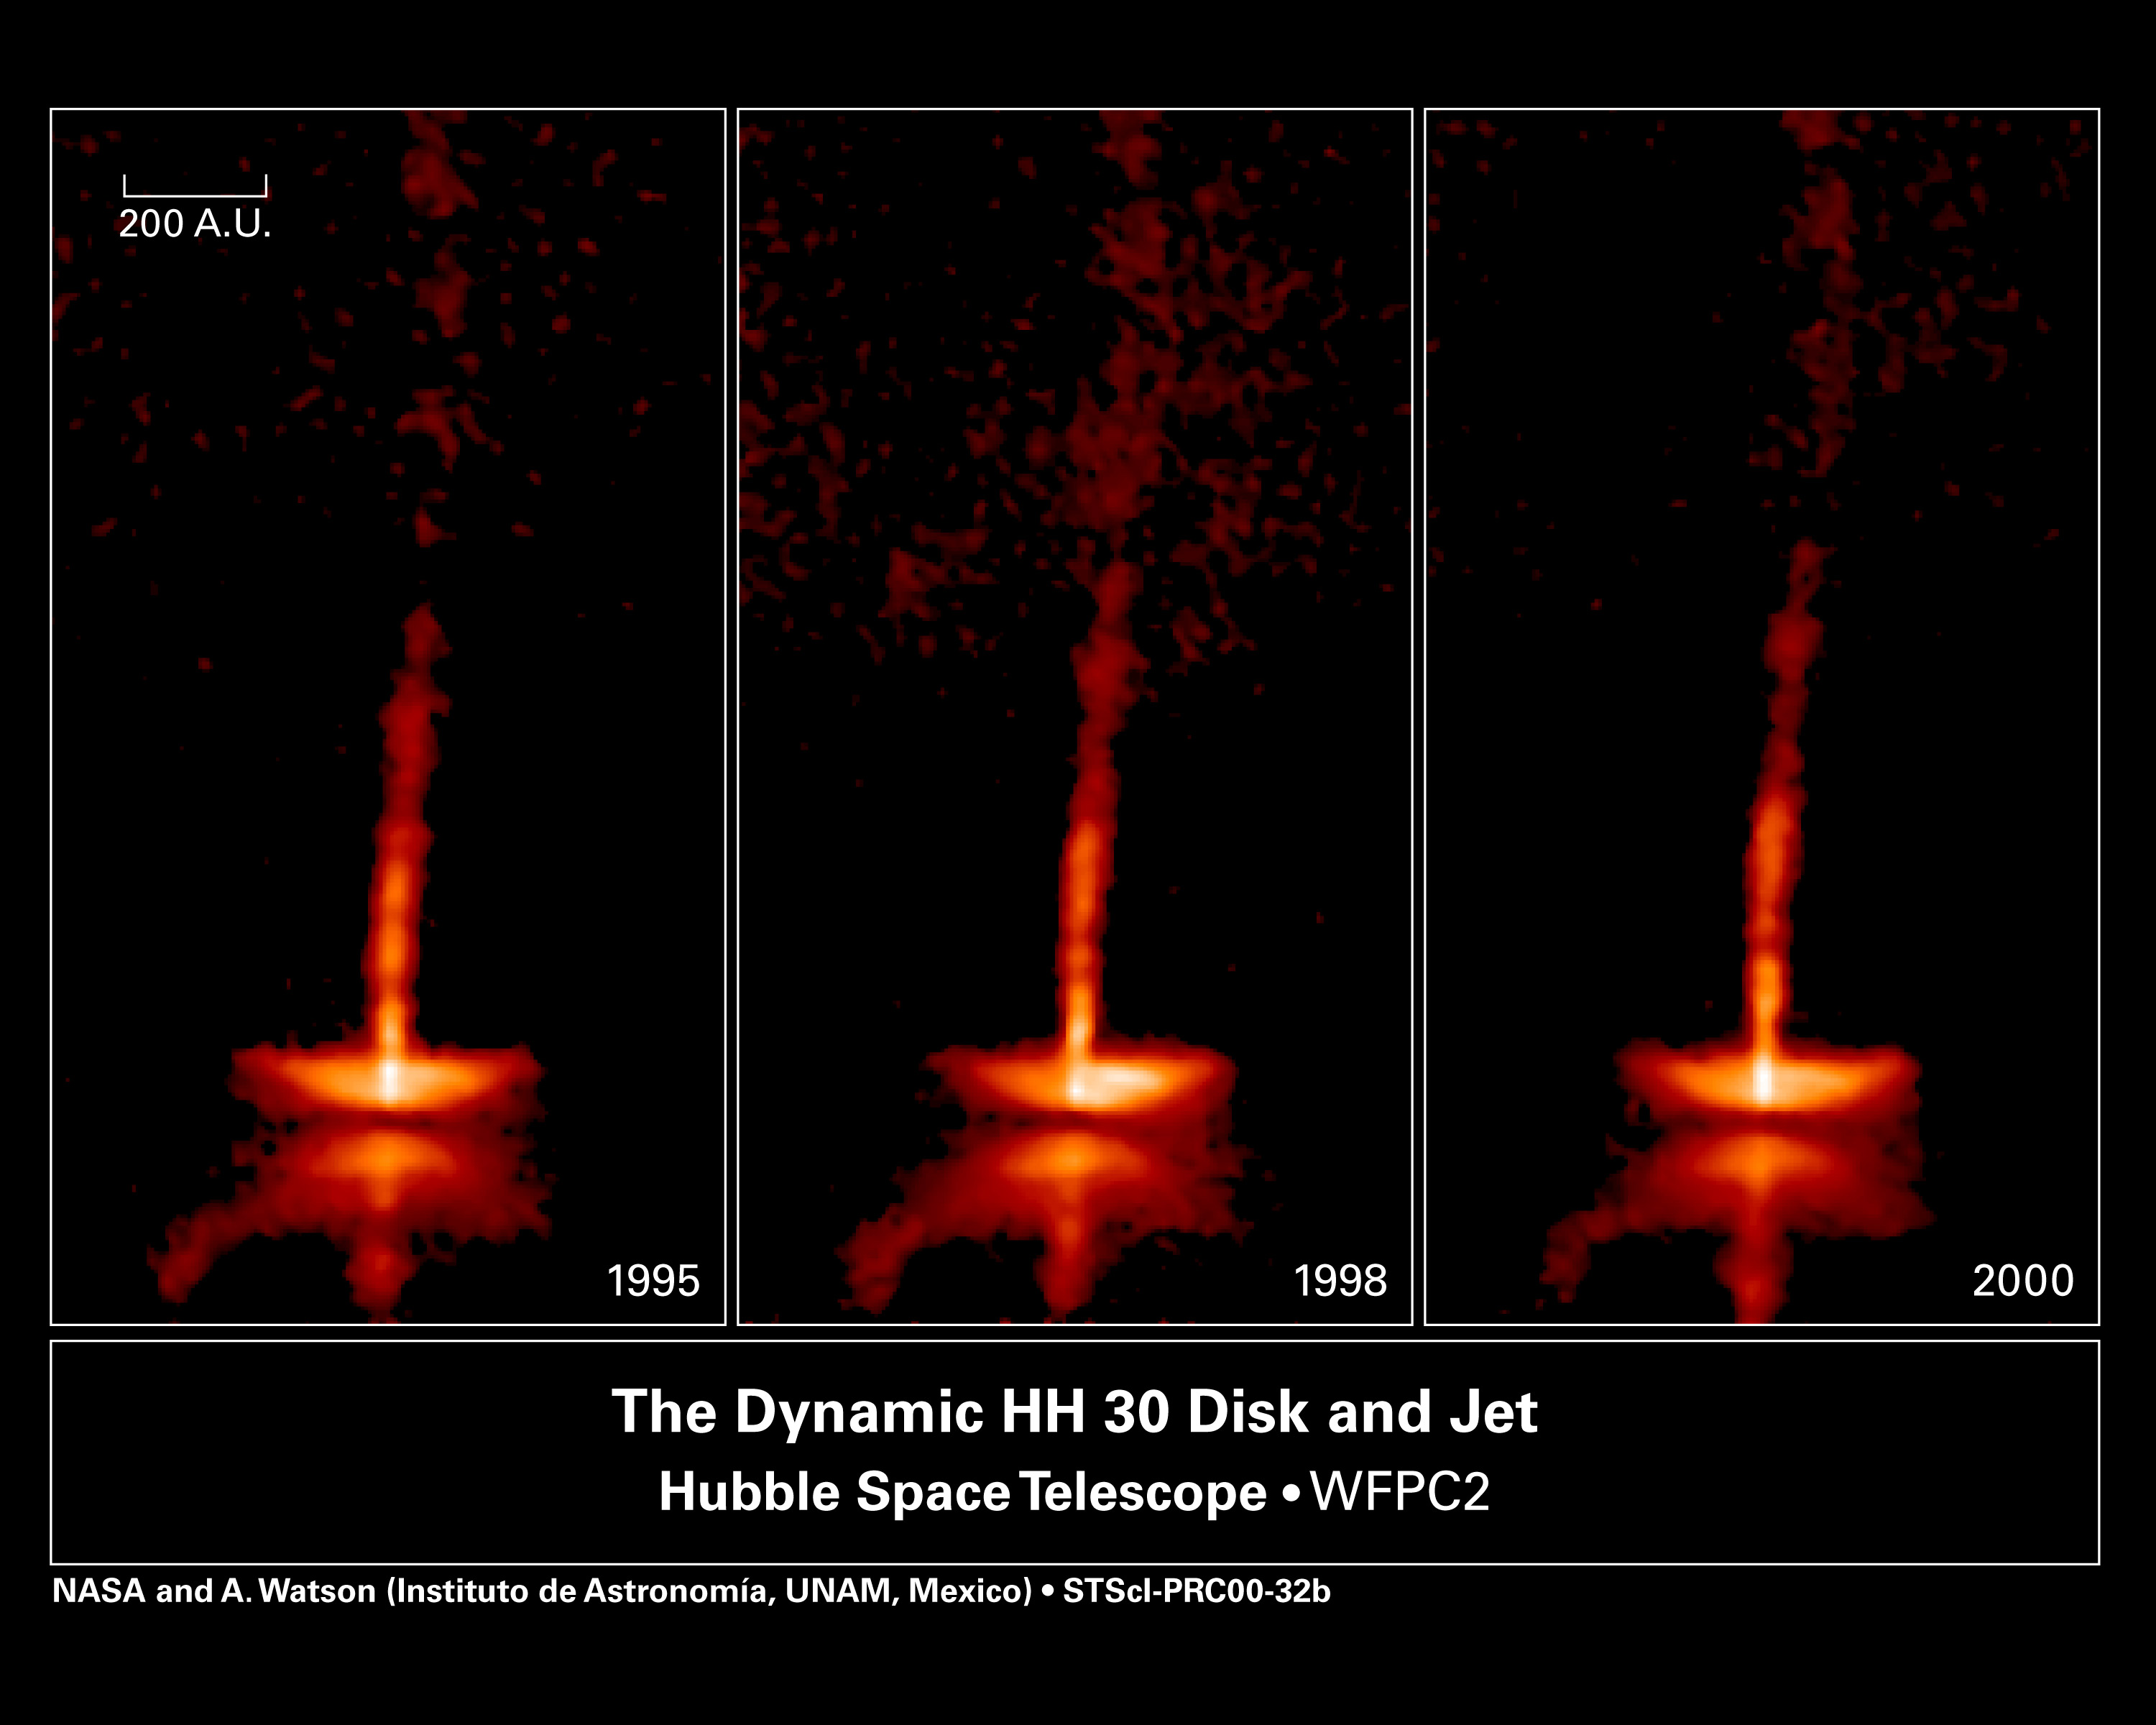

The dynamic HH-30 disk and jet

These images of HH 30 show changes over only a five-year period in the disk and jets of this newborn star, which is about half a million years old. The pictures were taken between 1995 and 2000 with the Wide Field and Planetary Camera 2aboard NASA/ESA Hubble Space Telescope. Astronomers are interested in the disk because it is probably similar to the one from which the Sun and the planets in our solar system formed.

Credit: NASA, Alan Watson (Universidad Nacional Autonoma de Mexico), Karl Stapelfeldt (Jet Propulsion Laboratory), John Krist and Chris Burrows (European Space Agency/ Space Telescope Science Institute).